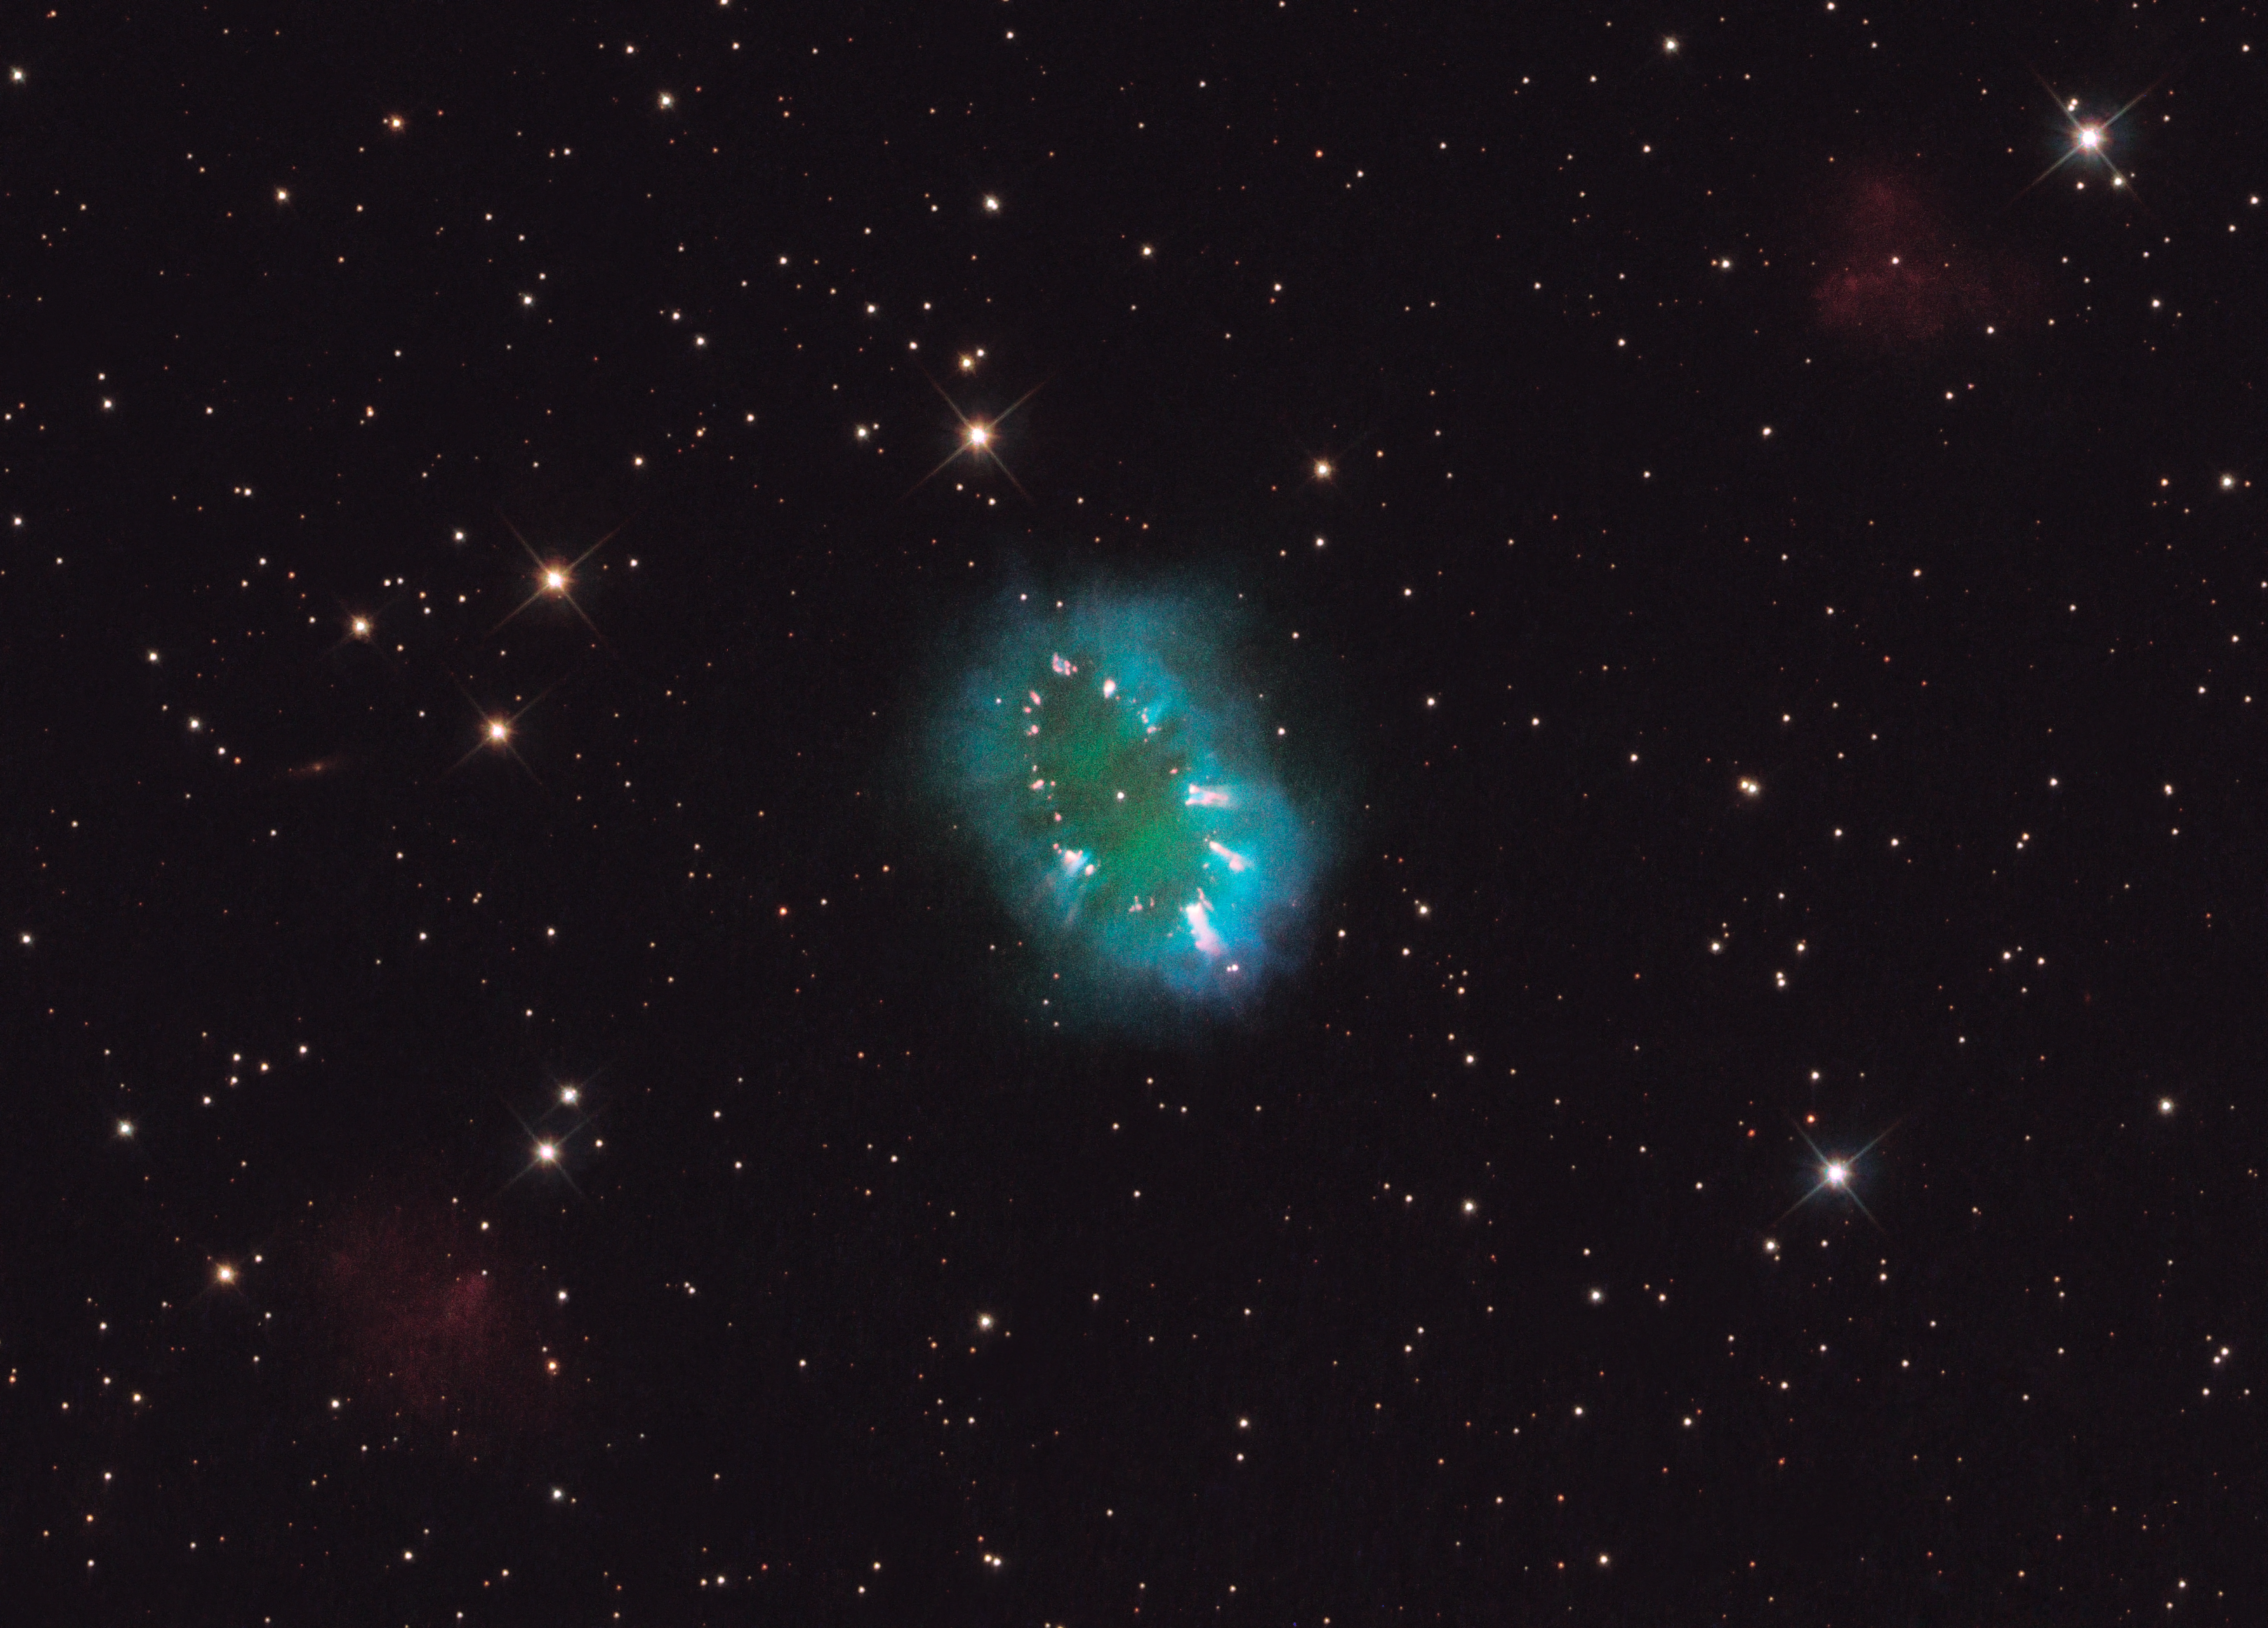

Hubble offers a dazzling necklace

A giant cosmic necklace glows brightly in this NASA/ESA Hubble Space Telescope image.

The object, aptly named the Necklace Nebula, is a recently discovered planetary nebula, the glowing remains of an ordinary, Sun-like star. The nebula consists of a bright ring, measuring about two light-years across, dotted with dense, bright knots of gas that resemble diamonds in a necklace. The knots glow brightly due to absorption of ultraviolet light from the central stars.

A pair of tightly orbiting stars produced the nebula, also called PN G054.2-03.4. About 25 000 years ago one of the aging stars ballooned to the point where it engulfed its companion star. The smaller star continued orbiting inside its larger companion, increasing the giant’s rotation rate, so that the bloated star span so fast that a large part of its gaseous envelope expanded into space. Most of the gas escaped along the star’s equator, producing a ring. The bright knots are dense gas clumps in the ring.

The pair is so close, only a few million kilometres apart, that they appear as one bright dot in the centre of this image. The stars are furiously whirling around each other, completing an orbit in a little more than a day. For comparison, Mercury, the innermost planet of our Solar System, orbits the Sun in 88 days.

The Necklace Nebula is located 15 000 light-years away in the constellation of Sagitta (The Arrow). In this composite image, taken on 2 July, Hubble’s Wide Field Camera 3 captured the glow of hydrogen (blue), oxygen (green), and nitrogen (red).

Editor's note (March 2024): The figure "25 000 years ago" was corrected from 10 000 years.

Credit: NASA, ESA and the Hubble Heritage Team (STScI/AURA)